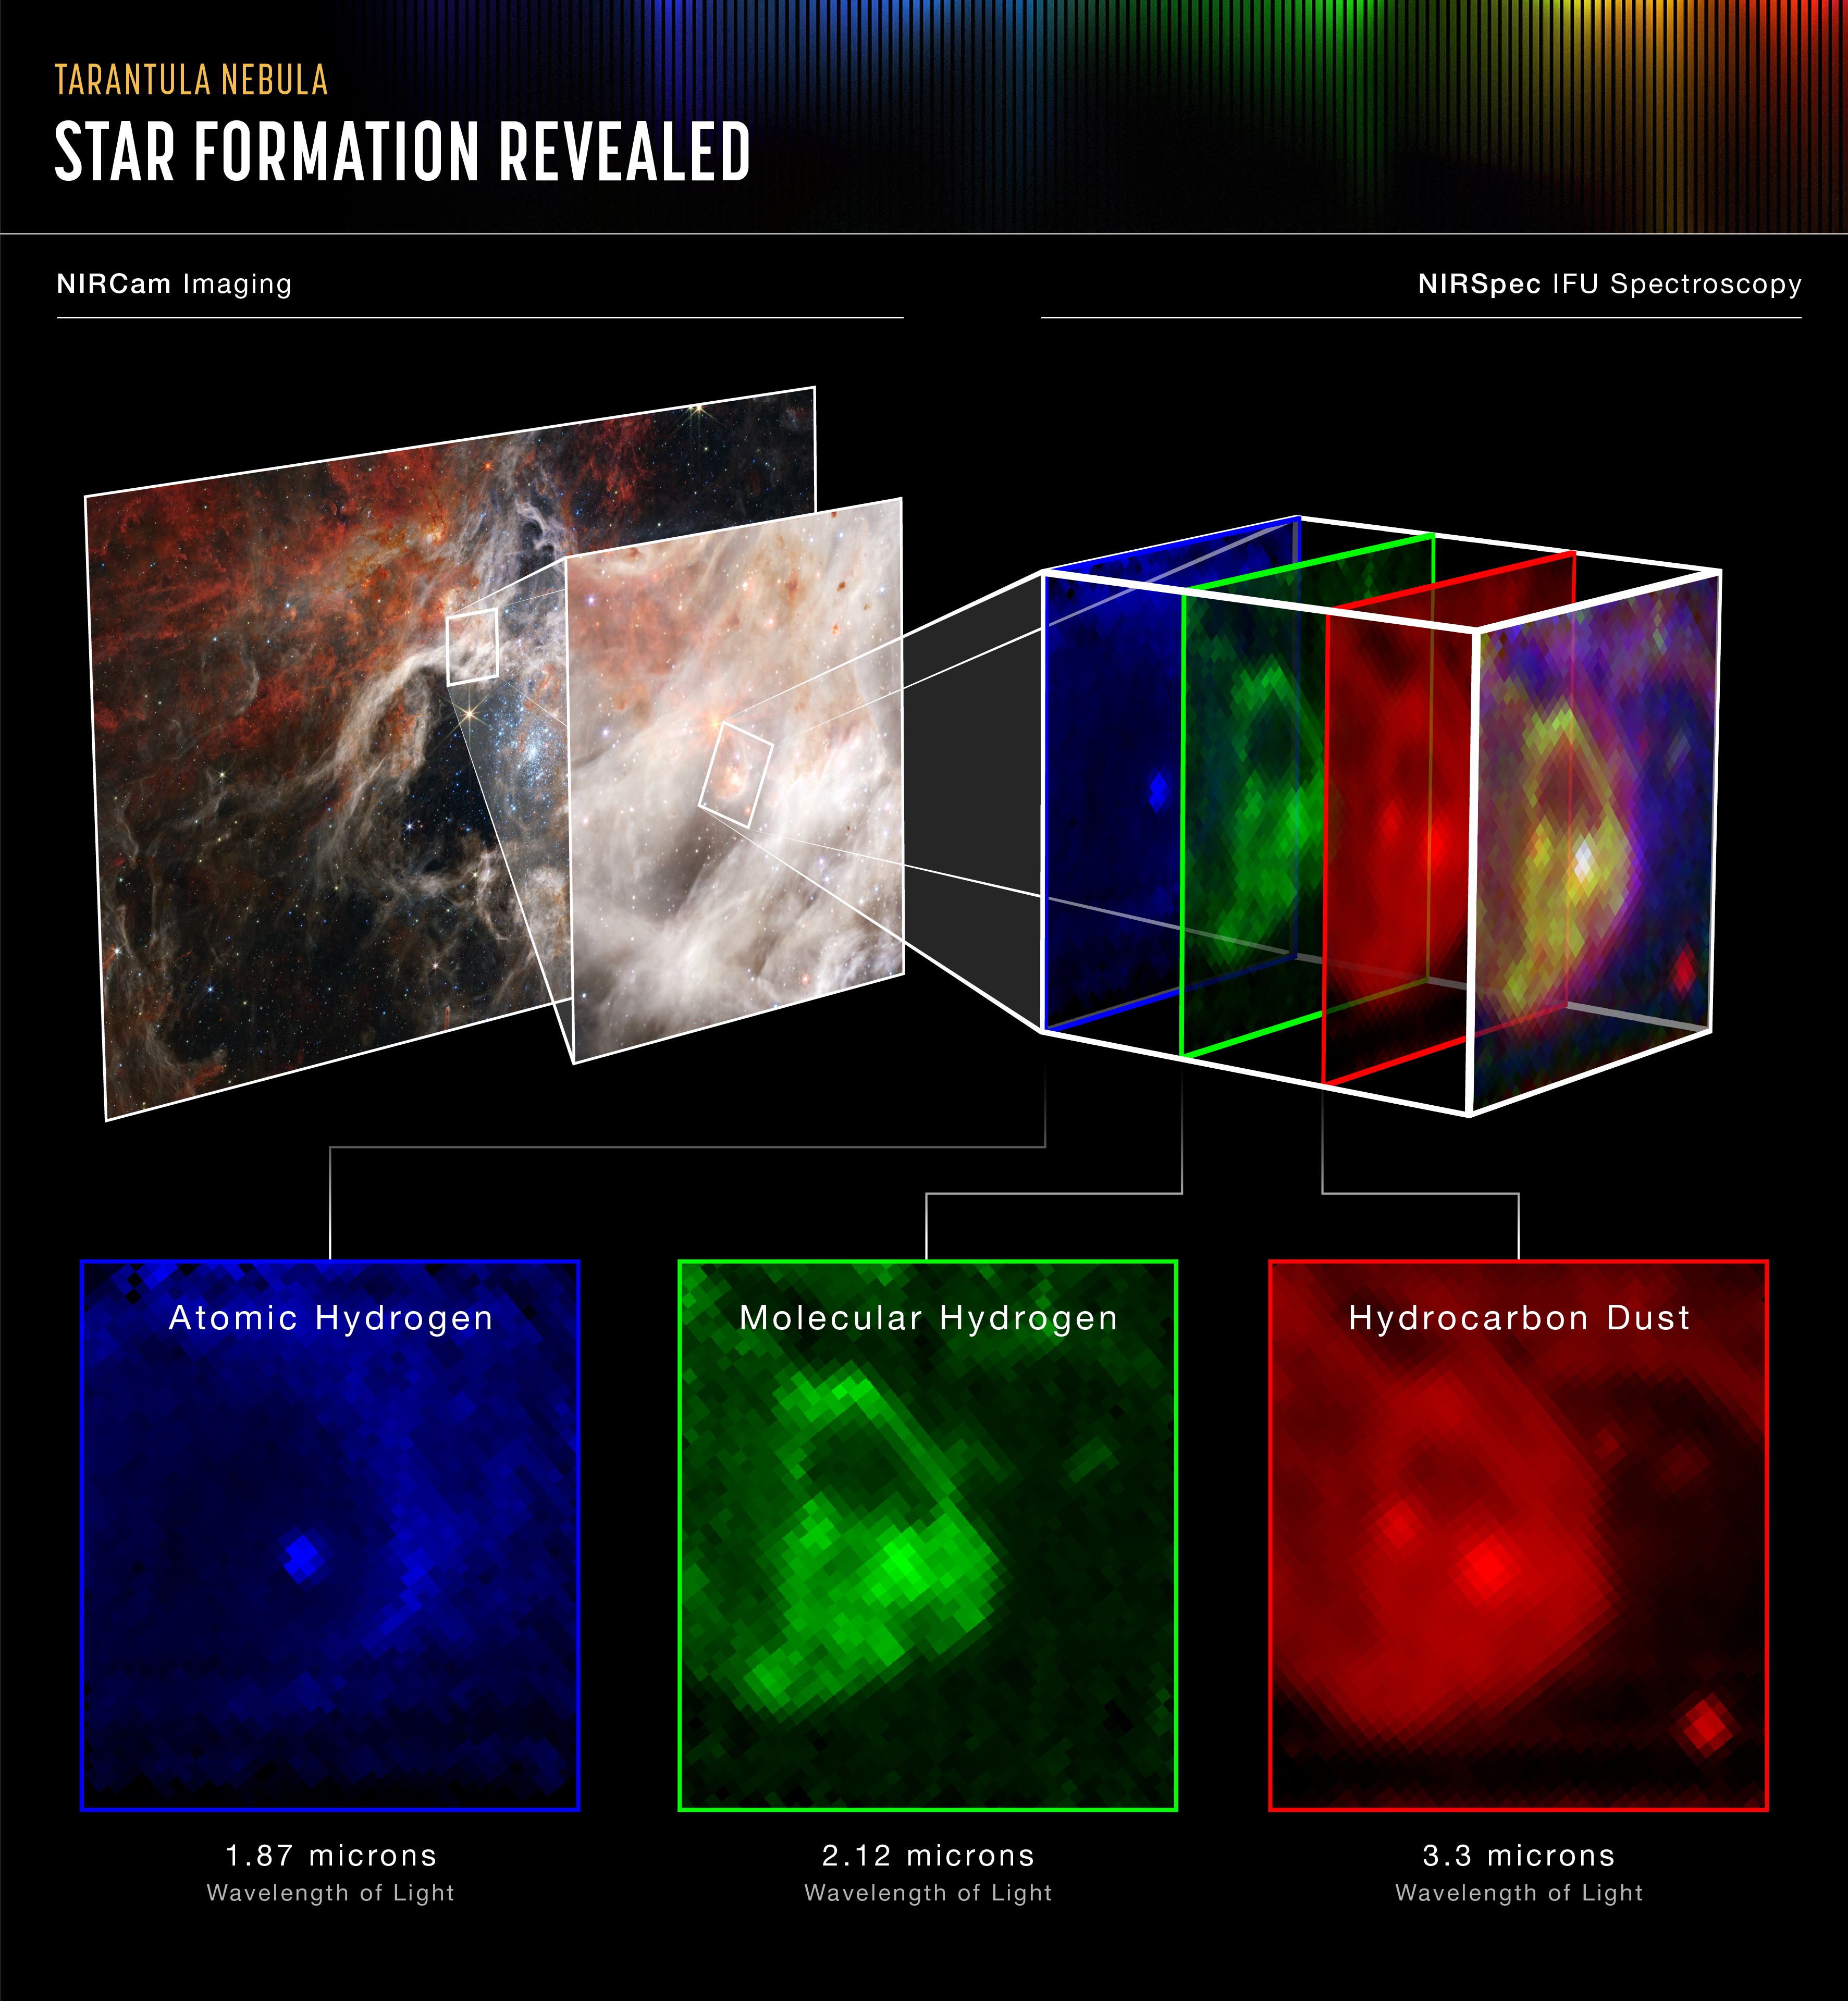

Tarantula Nebula (NIRSpec IFU)

Webb’s Near-Infrared Spectrograph (NIRSpec) reveals what is really going on in an intriguing region of the Tarantula Nebula. Astronomers focused the powerful instrument on what looked like a small bubble feature in the image from Webb’s Near-Infrared Camera (NIRCam). However, the spectra reveal a very different picture from a young star blowing a bubble in its surrounding gas.

The signature of atomic hydrogen, shown in blue, shows up in the star itself but not immediately surrounding it. Instead, it appears outside the “bubble,” which spectra show is actually “filled” with molecular hydrogen (green) and complex hydrocarbons (red). This indicates that the bubble is actually the top of a dense pillar of dust and gas that is being blasted by radiation from the cluster of massive young stars to its lower right (see the full NIRCam image). It does not appear as pillar-like as some other structures in the nebula because there is not much colour contrast with the area surrounding it.

The harsh stellar wind from the massive young stars in the nebula is breaking apart molecules outside the pillar, but inside they are preserved, forming a cushy cocoon for the star. This star is still too young to be clearing out its surroundings by blowing bubbles – NIRSpec has captured it just beginning to emerge from the protective cloud from which it was formed. Without Webb’s resolution at infrared wavelengths, the discovery of this star birth in action would not have been possible.

NIRSpec was built for the European Space Agency (ESA) by a consortium of European companies led by Airbus Defence and Space (ADS) with NASA’s Goddard Space Flight Center providing its detector and micro-shutter subsystems.

Credit: NASA, ESA, CSA, and STScI